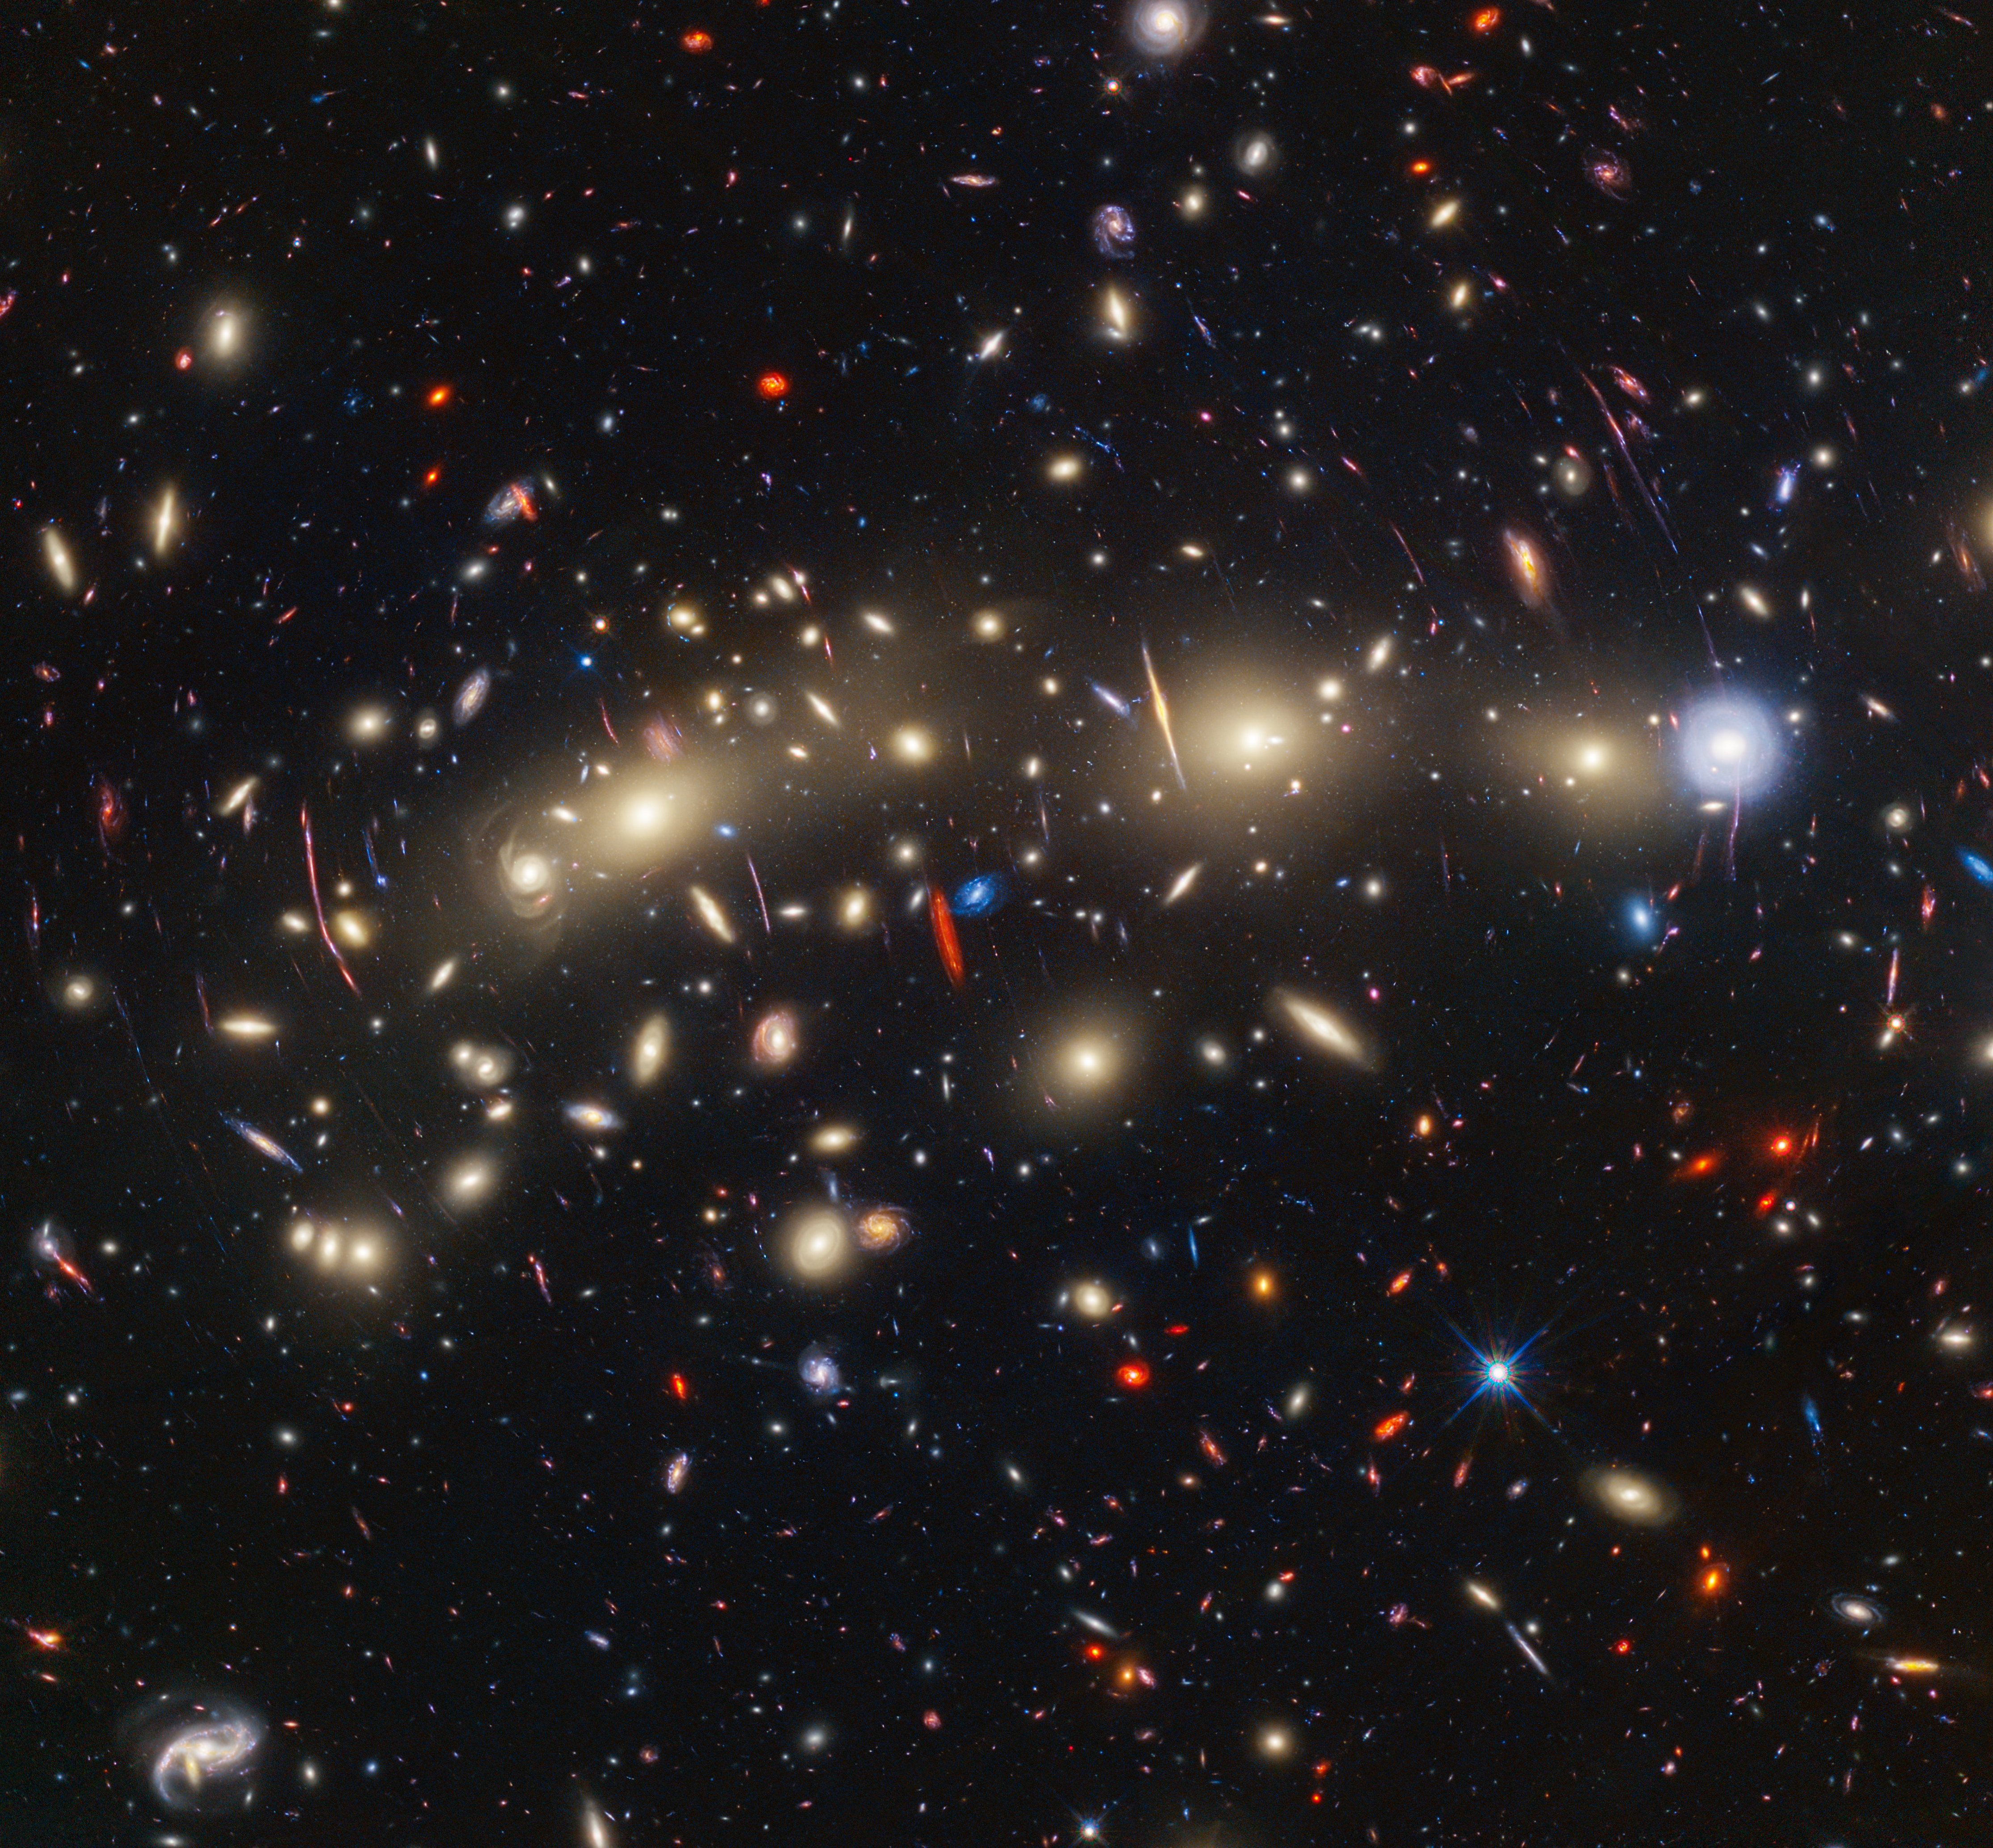

Galaxy cluster MACS0416 (Hubble and Webb composite image)

This panchromatic view of galaxy cluster MACS0416 was created by combining infrared observations from the NASA/ESA/CSA James Webb Space Telescope with visible-light data from the NASA/ESA Hubble Space Telescope. To make the image, in general the shortest wavelengths of light were colour-coded blue, the longest wavelengths red, and intermediate wavelengths green. The resulting wavelength coverage, from 0.4 to 5 microns, reveals a vivid landscape of galaxies that could be described as one of the most colourful views of the universe ever created.

MACS0416 is a galaxy cluster located about 4.3 billion light-years from Earth, meaning that the light from it that we see now left the cluster shortly after the formation of our Solar System. This cluster magnifies the light from more distant background galaxies through gravitational lensing. As a result, the research team has been able to identify magnified supernovae and even very highly magnified individual stars.

Those colours give clues to galaxy distances: the bluest galaxies are relatively nearby and often show intense star formation, as best detected by Hubble, while the redder galaxies tend to be more distant, or else contain copious amounts of dust, as best detected by Webb. The image reveals a wealth of details that it is only possible to capture by combining the power of both space telescopes.

In this image, blue represents data at wavelengths of 0.435, 0.606, 0.814, and 1.05 microns (Hubble filters F435W, F606W, F814W, and F105W). Green combines data at 0.90, 1.15, 1.5, 1.6, 2.0, and 2.77 microns (Hubble filter F160W and Webb filters F090W, F115W, F150W, F200W, and F277W). Red represents data at 3.56, 4.1, and 4.44 microns (Webb filters F356W, F410M and F444W).

Credit: NASA, ESA, CSA, STScI, J. Diego (Instituto de Física de Cantabria, Spain), J. D’Silva (U. Western Australia), A. Koekemoer (STScI), J. Summers & R. Windhorst (ASU), and H. Yan (U. Missouri)